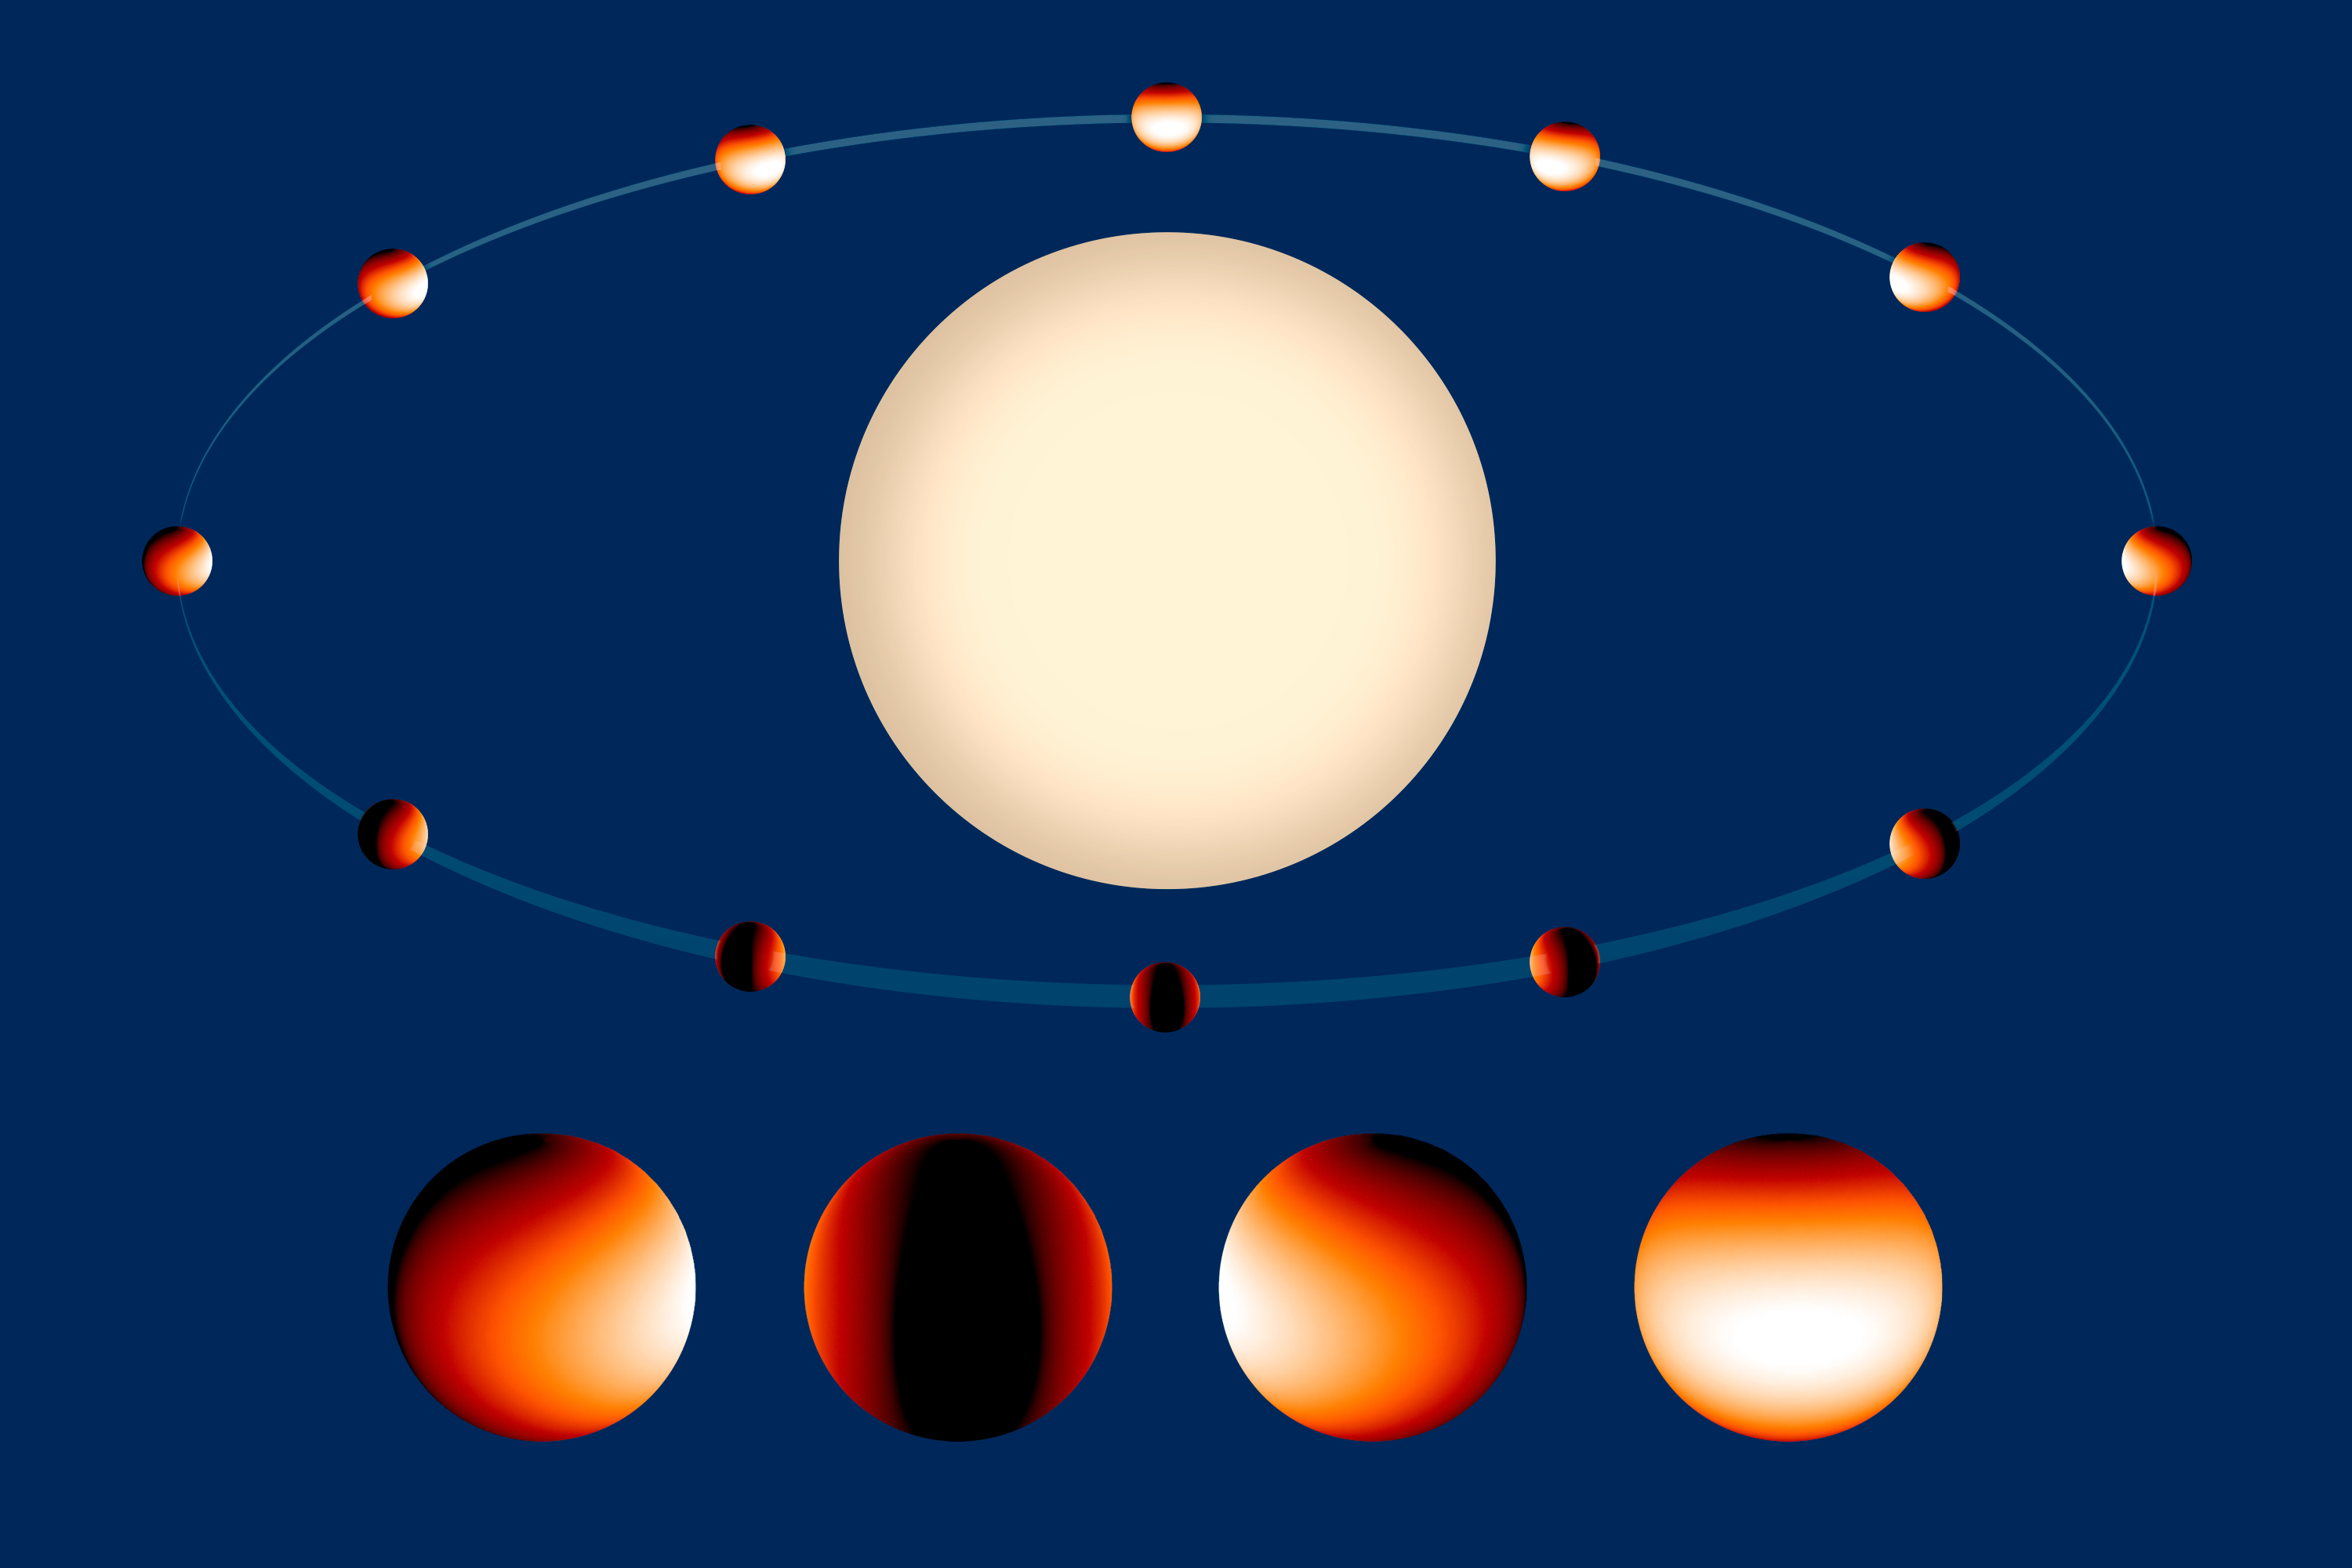

Exoplanet WASP-43b orbits its parent star

In this artist’s illustration the Jupiter-sized planet WASP-43b orbits its parent star in one of the closest orbits ever measured for an exoplanet of its size — with a year lasting just 19 hours.

The planet is tidally locked, meaning it keeps one hemisphere facing the star, just as the Moon keeps one face toward Earth.

The colour scale on the planet represents the temperature across its atmosphere. This is based on data from a recent study that mapped the temperature of WASP-43b in more detail than has been done for any other exoplanet.

Credit: NASA, ESA, and Z. Levay (STScI)